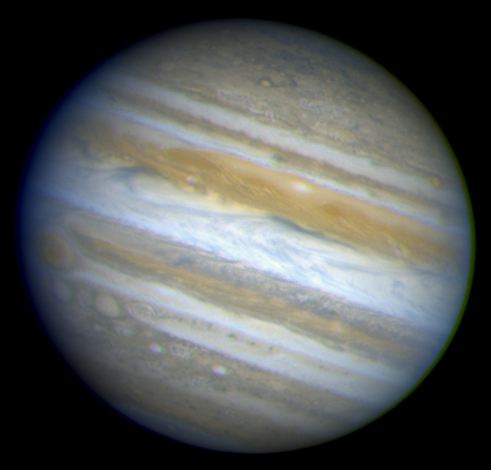

Hubble Provides Complete View of Jupiter's Auroras

Jupiter's auroral images are superimposed on a Wide Field and Planetary Camera 2image of the entire planet. The auroras are brilliant curtains of light in Jupiter's upper atmosphere. Jovian auroral storms, like Earth's, develop when electrically charged particles trapped in the magnetic field surrounding the planet spiral inward at high energies toward the north and south magnetic poles.

Credit: John Clarke (University of Michigan), and NASA/ESA